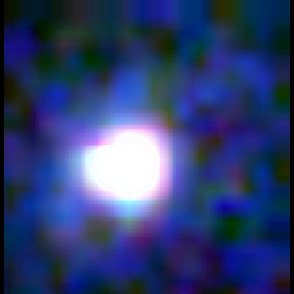

Galaxy building blocks

This is one Proto Galaxy out of a series of 18, taken by the Wide Field Planetary Camera 2.

Credit: Rogier Windhorst and Sam Pascarelle (Arizona State University) and NASA/ESA